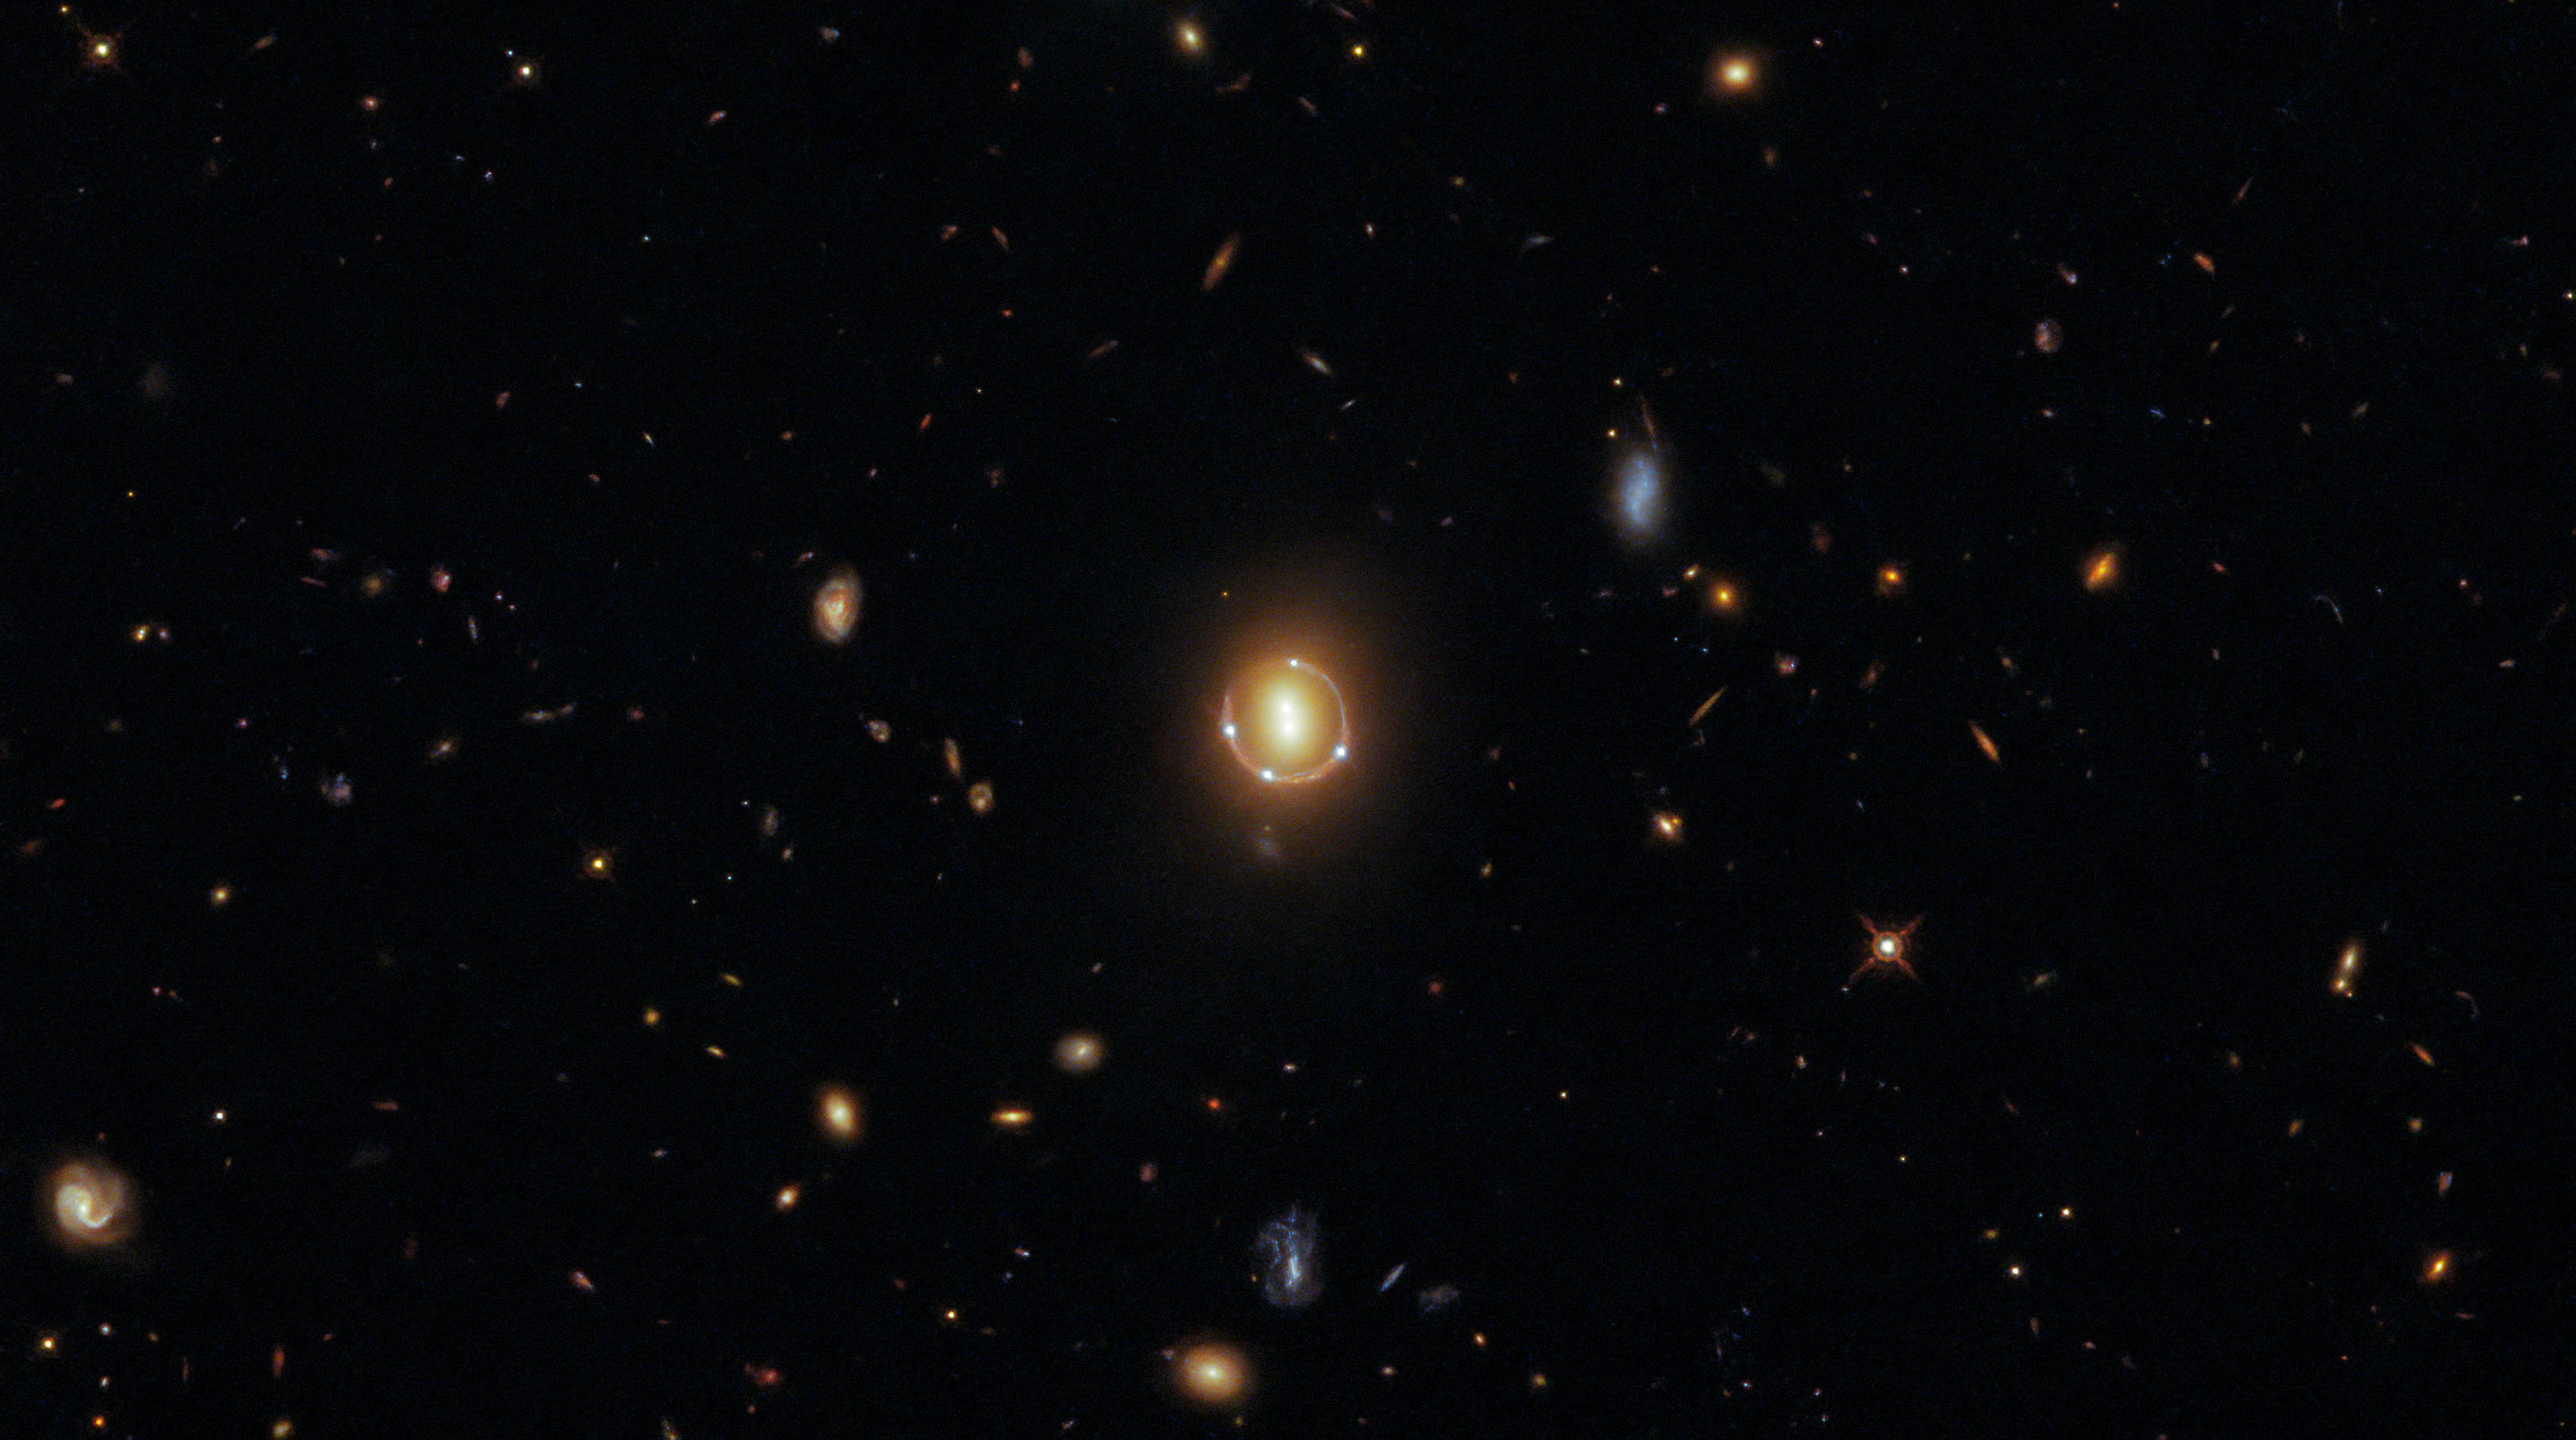

Seeing Quintuple

Clustered at the centre of this image are six luminous spots of light, four of them forming a circle around a central pair. Appearances can be deceiving, however, as this formation is not composed of six individual galaxies, but only three: to be precise, a pair of galaxies and one distant quasar. Hubble data also indicates that there is a seventh spot of light in the very center, which is a rare fifth image of the distant quasar. This rare phenomenon is caused by the presence of two galaxies in the foreground that act as a lens.

These galaxies were imaged in spectacular detail by Hubble’s Wide Field Camera 3 (WFC3), which was installed on Hubble in 2009 during Hubble Servicing Mission 4, Hubble’s final servicing mission. The WFC3 was intended to operate until 2014, but 12 years after it was installed it continues to provide both top-quality data and fantastic images, such as this one.

The central pair of galaxies in this image are genuinely two separate galaxies. The four bright points circling them, and the fainter one in the very center, are actually five separate images of a single quasar (known as 2M1310-1714), an extremely luminous but distant object. The reason behind this “seeing quintuple” effect is a phenomenon known as gravitational lensing. Gravitational lensing occurs when a celestial object with an enormous amount of mass — such as a pair of galaxies — causes the fabric of space to warp such that the light travelling through that space from a distant object is bent and magnified sufficiently that humans here on Earth can observe multiple magnified images of the far-away source. The quasar in this image actually lies further away from Earth than the pair of galaxies. The light from the quasar has been bent around the galaxy pair because of their enormous mass, giving the incredible appearance that the galaxy pair are surrounded by four quasars — whereas in reality, a single quasar lies far beyond them!

Credit: ESA/Hubble & NASA, T. Treu Acknowledgment: J. Schmidt